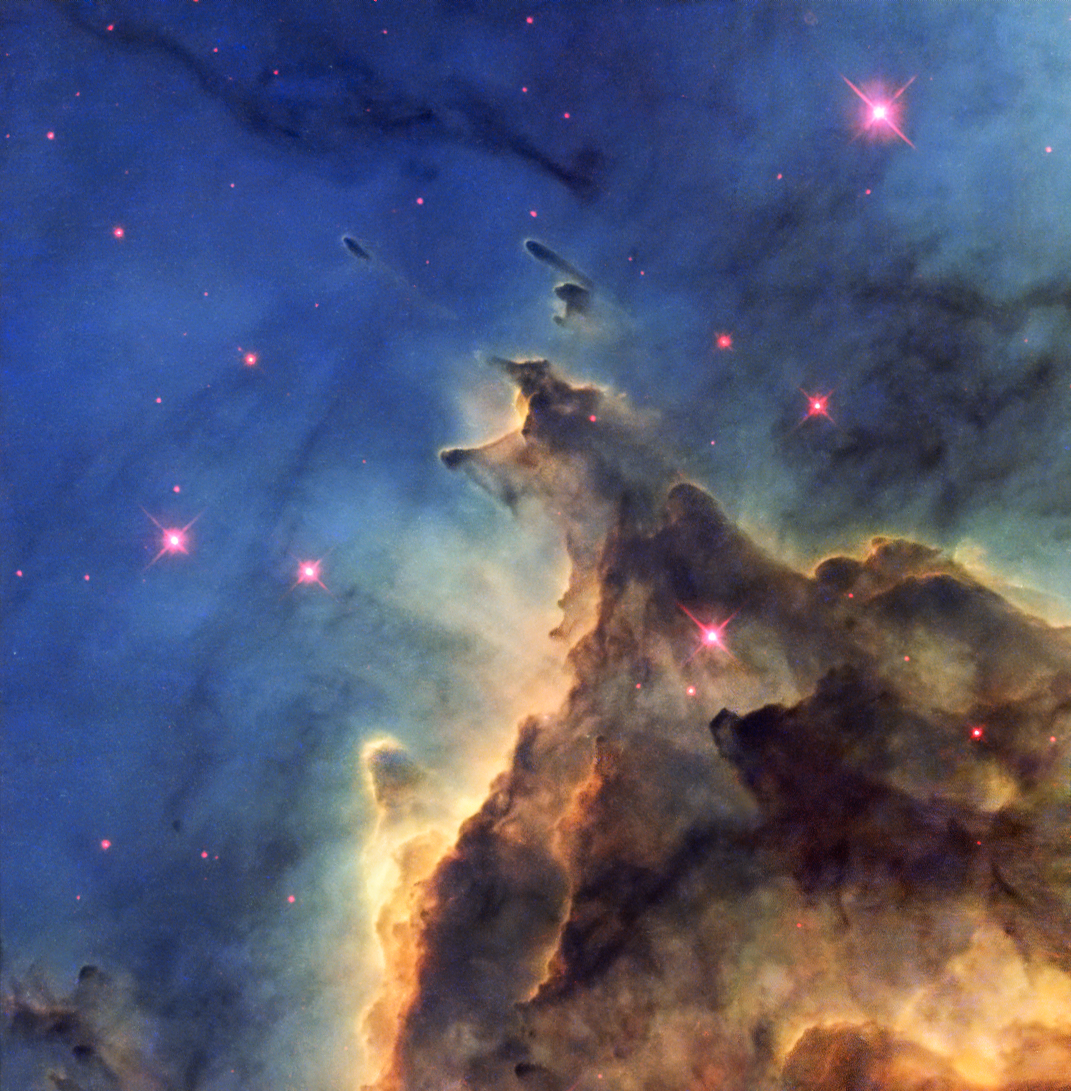

Fiery young stars wreak havoc in stellar nursery

The NASA/ESA Hubble Space Telescope has imaged a violent stellar nursery called NGC 2174, in which stars are born in a first-come-first-served feeding frenzy for survival.

The problem is that star formation is a very inefficient process; most of the ingredients to make stars are wasted as the cloud of gas and dust, or nebula, gradually disperses. In NGC 2174, the rate at which the nebula disperses is further speeded up by the presence of hot young stars, which create high velocity winds that blow the gas outwards.

These fiery youngsters also bombard the surrounding gas with intense radiation, making it glow brightly, creating the brilliant scene captured here. The nebula is mostly composed of hydrogen gas, which is ionised by the ultraviolet radiation emitted by the hot stars, leading to the nebula’s alternative title as an HII region. This picture shows only part of the nebula, where dark dust clouds are strikingly silhouetted against the glowing gas.

NGC 2174 lies about 6400 light-years away in the constellation of Orion (The Hunter). It is not part of the much more familiar Orion Nebula, which lies much closer to us. Despite its prime position in a very familiar constellation this nebula is faint and had to wait until 1877 for its discovery by the French astronomer Jean Marie Edouard Stephan using an 80 cm reflecting telescope at the Observatoire de Marseille.

This picture was created from images from the Wide Field Planetary Camera 2 on Hubble. Images through four different filters were combined to make the view shown here. Images through a filter isolating the glow from ionised oxygen (F502N) were coloured blue and images through a filter showing glowing hydrogen (F656N) are green. Glowing ionised sulphur (F673N) and the view through a near-infrared filter (F814W) are both coloured red. The total exposure times per filter were 2600 s, 2600 s, 2600 s and 1000 s respectively and the field of view is about 1.8 arcminutes across.

Credit: ESA/Hubble & NASA